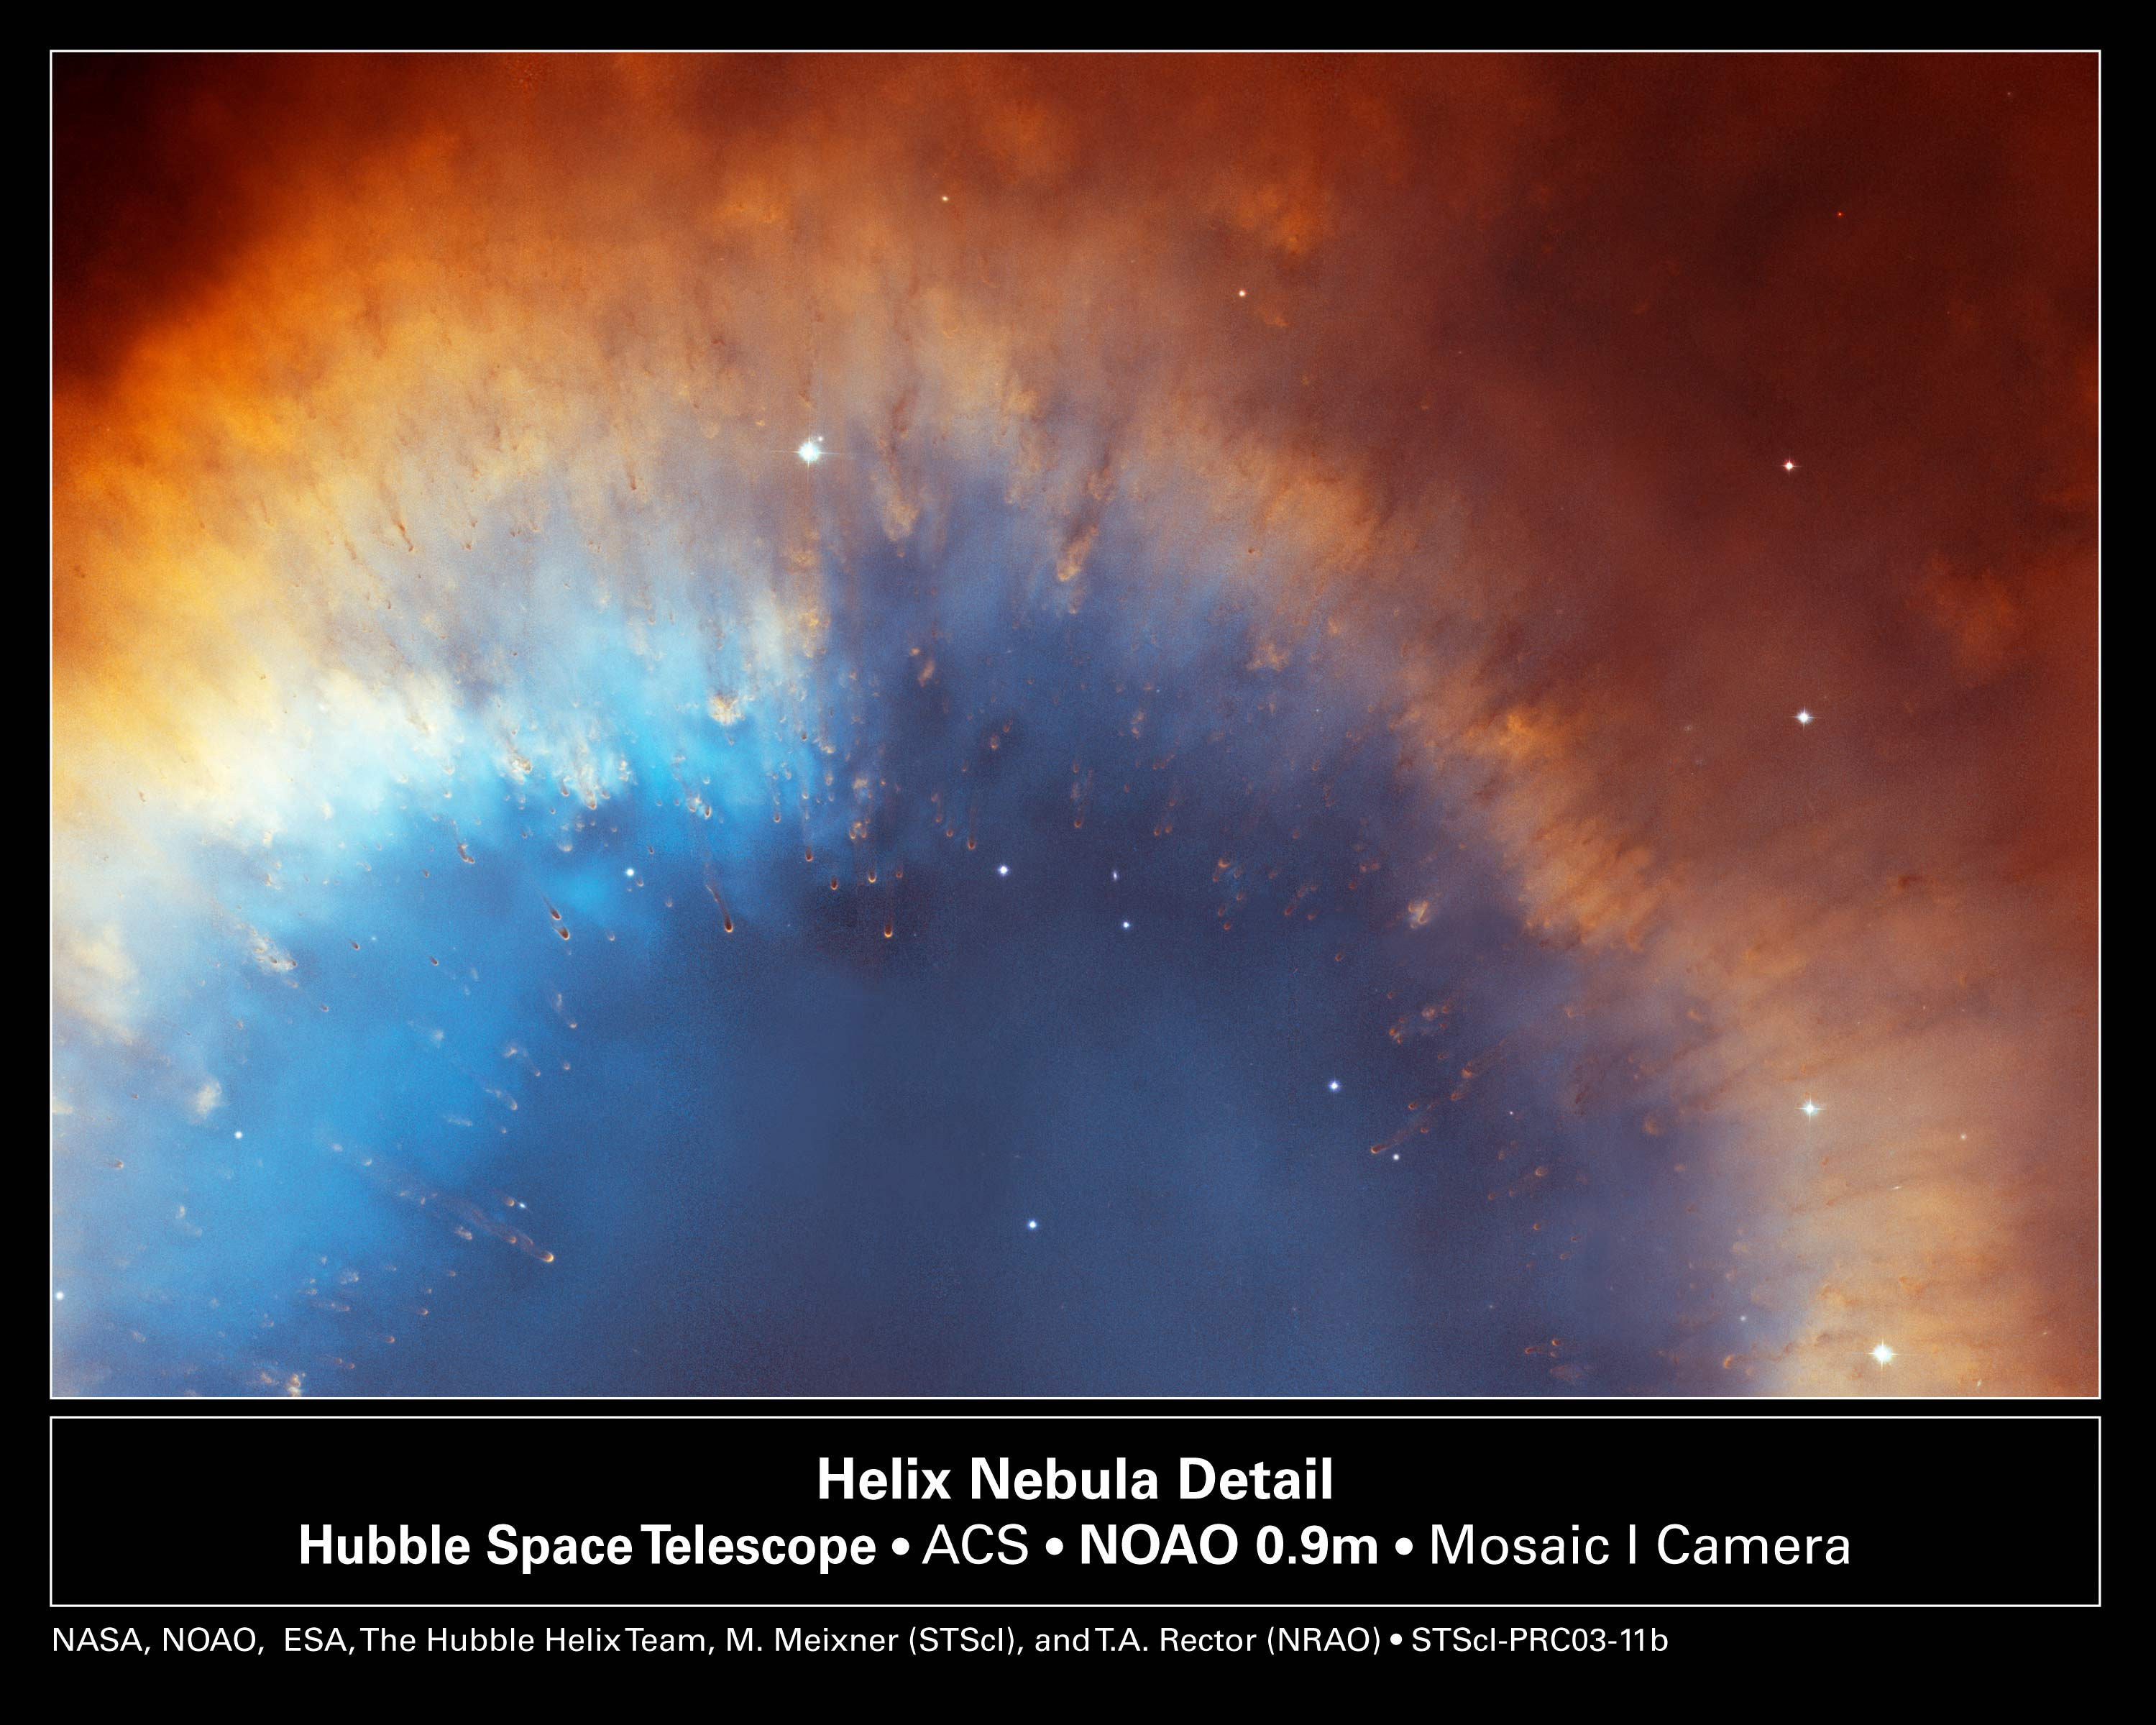

Helix Nebula Detail

This cropped version of the Helix Nebula mosaic shows cometary-filaments embedded along a portion of the inner rim of the nebula's red and blue gas ring. At a distance of 650 light-years, the Helix is one of the nearest planetary nebulae to Earth.

The composite picture is a seamless blend of ultra-sharp NASA/ESA Hubble Space Telescope (HST) Advanced Camera for Surveys images combined with the wide view of the Mosaic Camera on the National Science Foundation's 0.9-meter telescope at Kitt Peak National Observatory, part of the National Optical Astronomy Observatory, near Tucson, Ariz. Astronomers at the Space Telescope Science Institute (STScI) assembled the images into a mosaic. The mosaic was blended with a wider photograph taken by the Mosaic Camera.

Credit: NASA, NOAO, ESA, the Hubble Helix Nebula Team, M. Meixner (STScI), and T.A. Rector (NRAO).